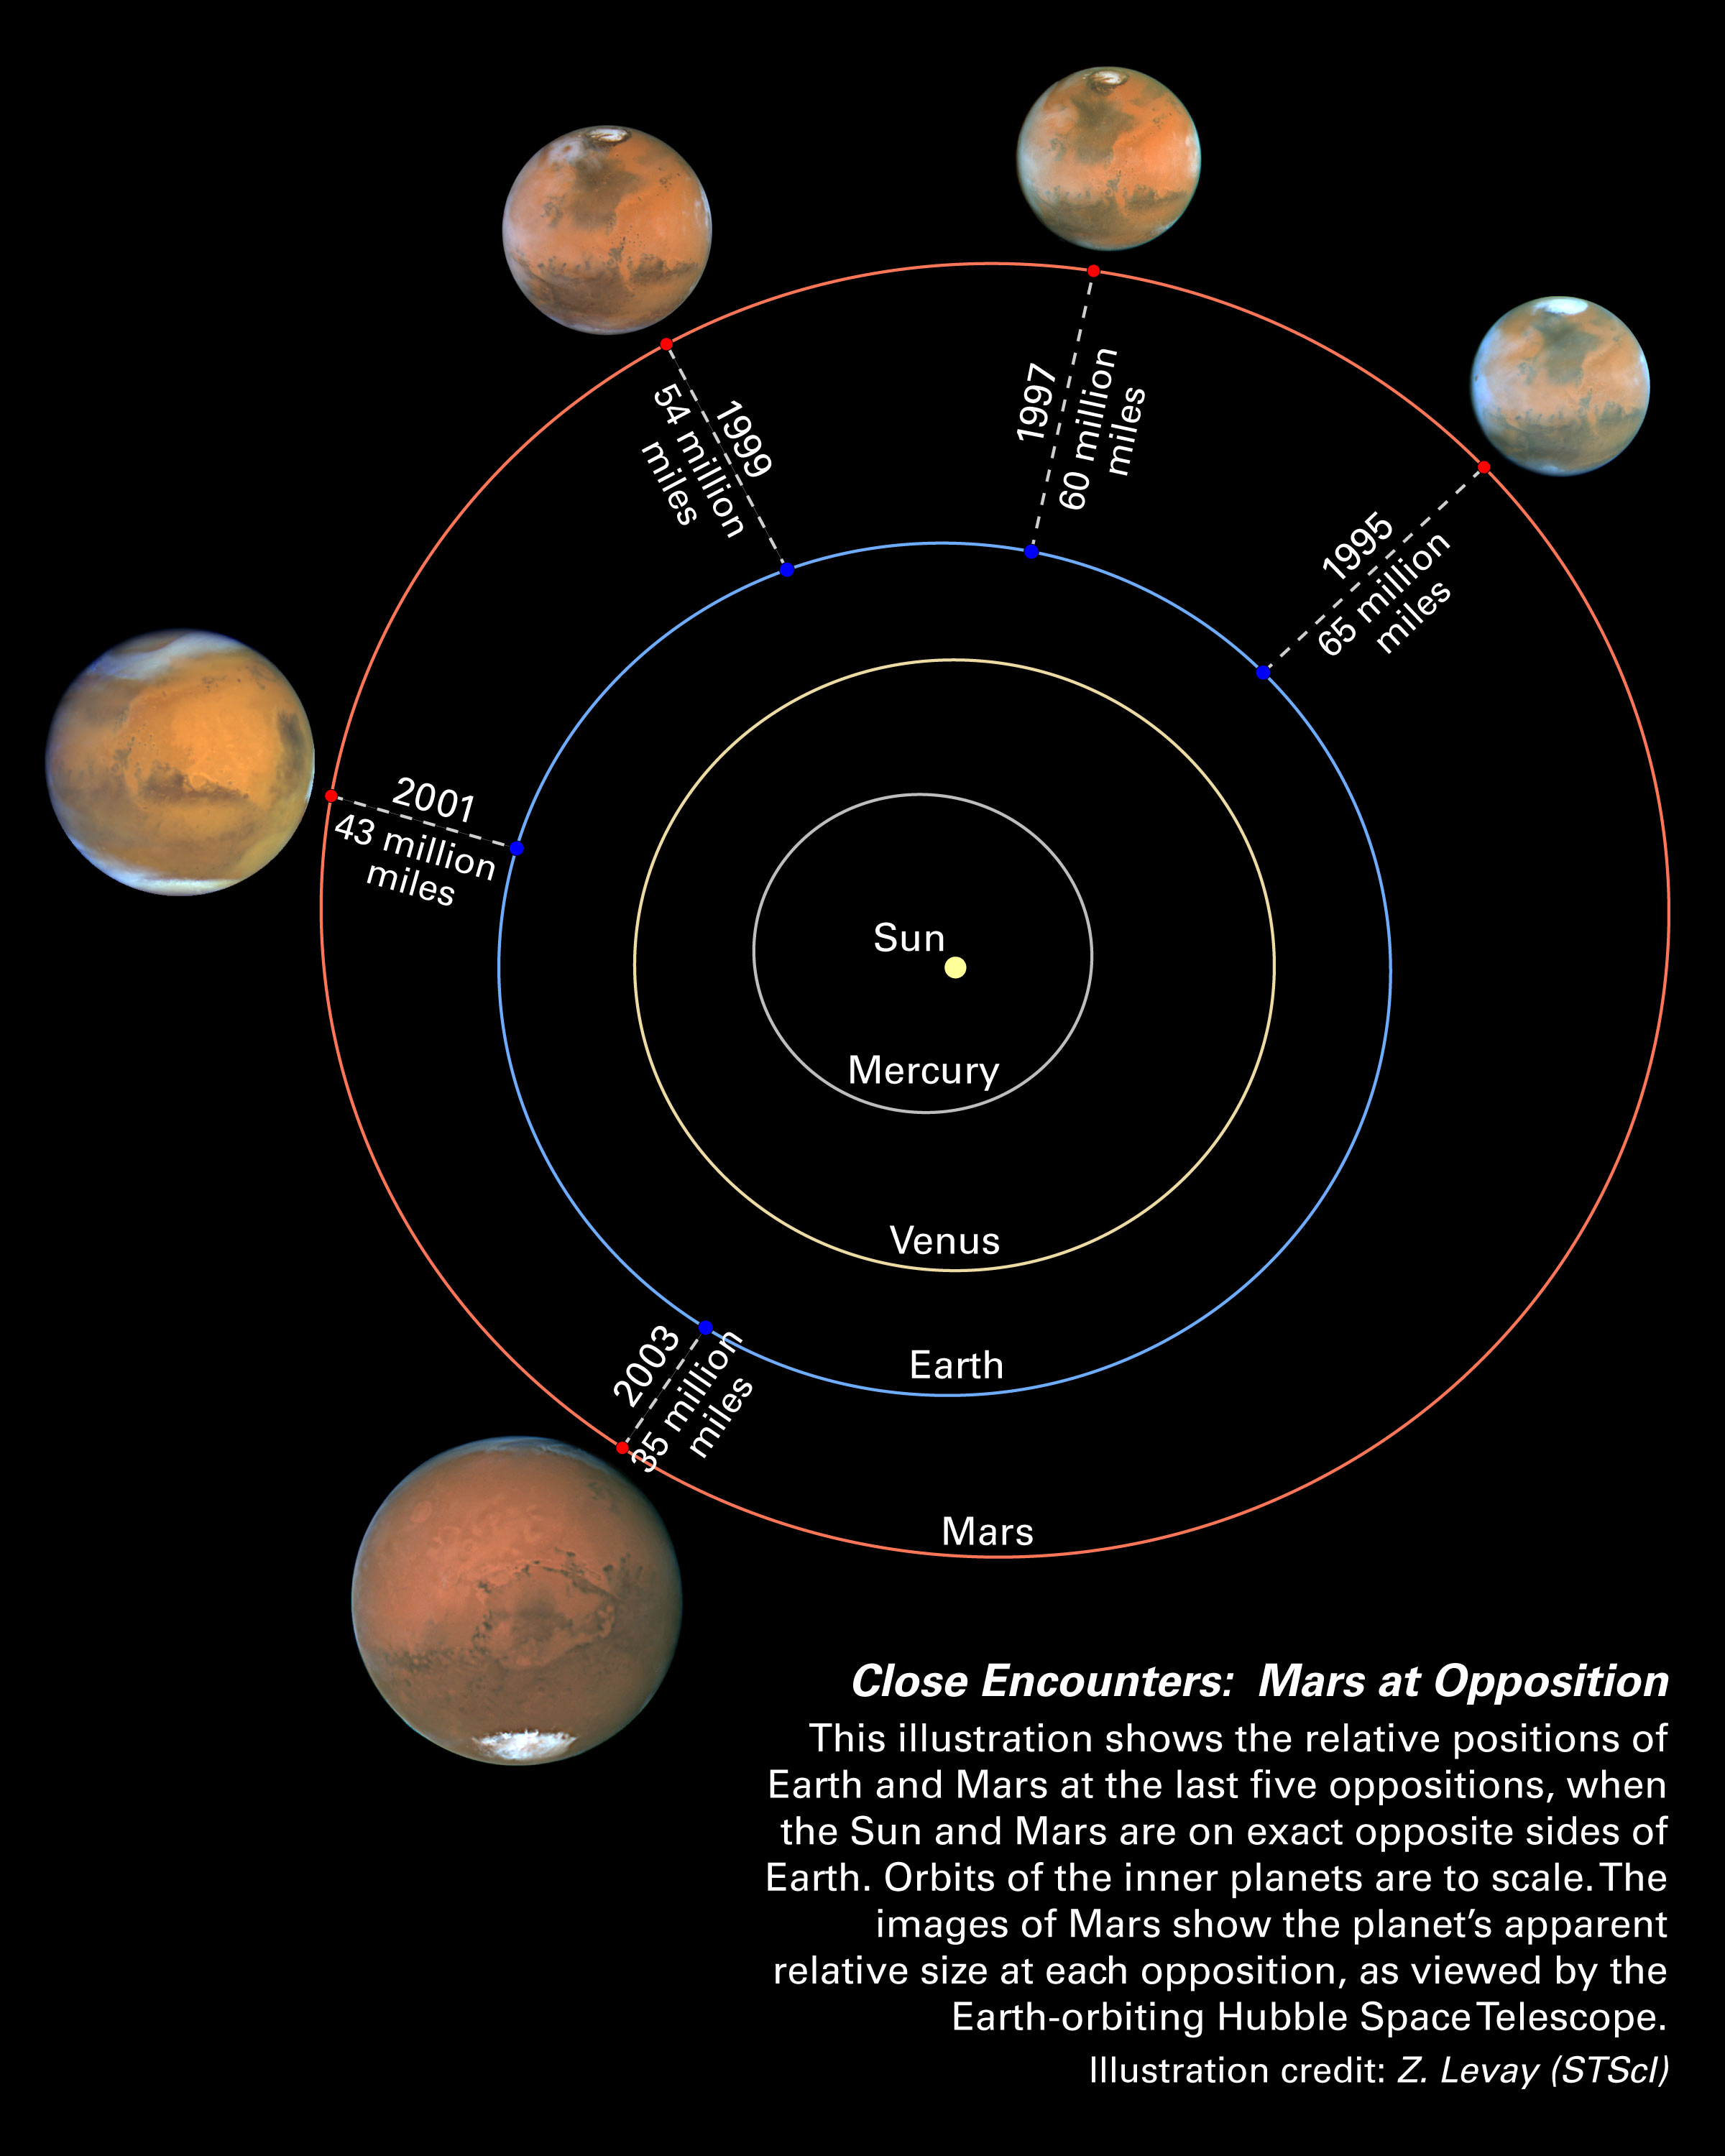

Mars oppositions Solar System diagram

Mars is hurtling toward Earth at a rate of 22,000 miles an hour (36,000 kilometers an hour)! Not to worry. The two planets are just setting the stage for their closest encounter in recorded human history. On August 27, 2003, the third and fourth planets from the Sun will be within 35 million miles (56 million kilometers) of each other.

Credit: NASA/ESA and Z. Levay (STScI)